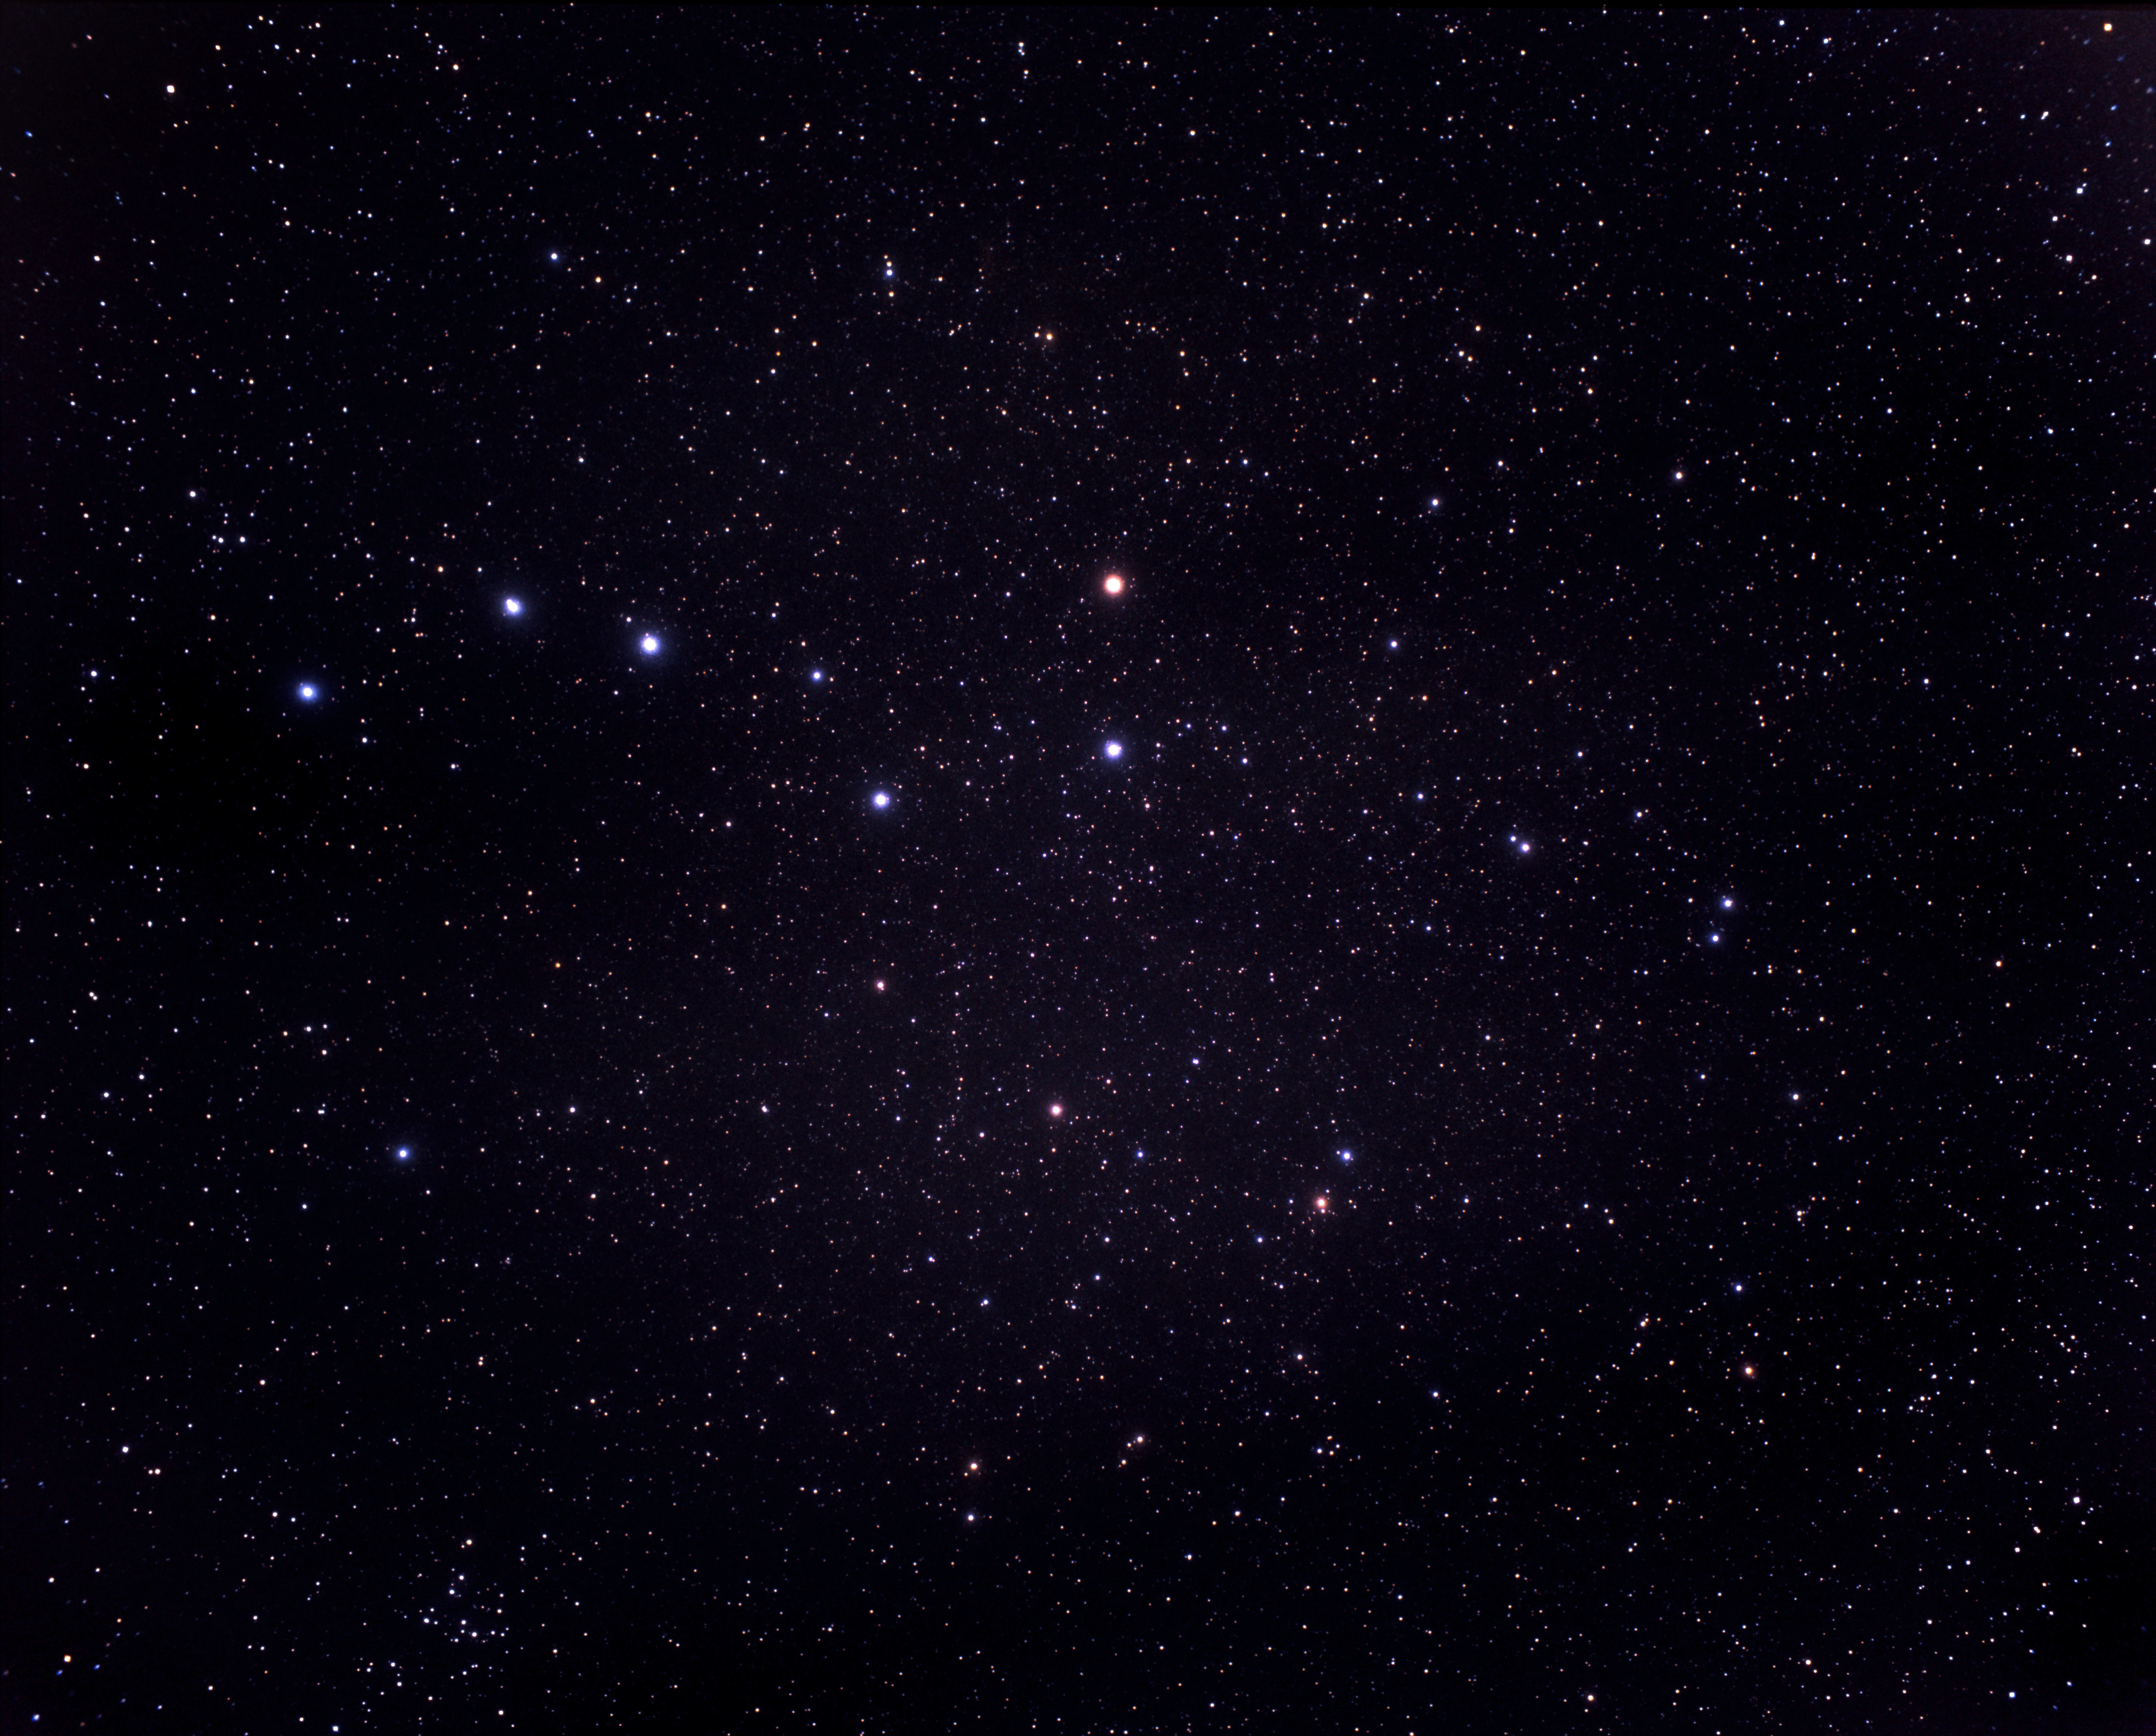

A very wide-field view of the constellations of Ursa Major and Coma Berenices (ground-based image)

This picture, taken with a small ground-based camera, shows most of the famous constellation of Ursa Major, including the seven stars of the "Big Dipper" or Plough. The constellation of Coma Berenices appears at the lower left.

Credit: A. Fujii